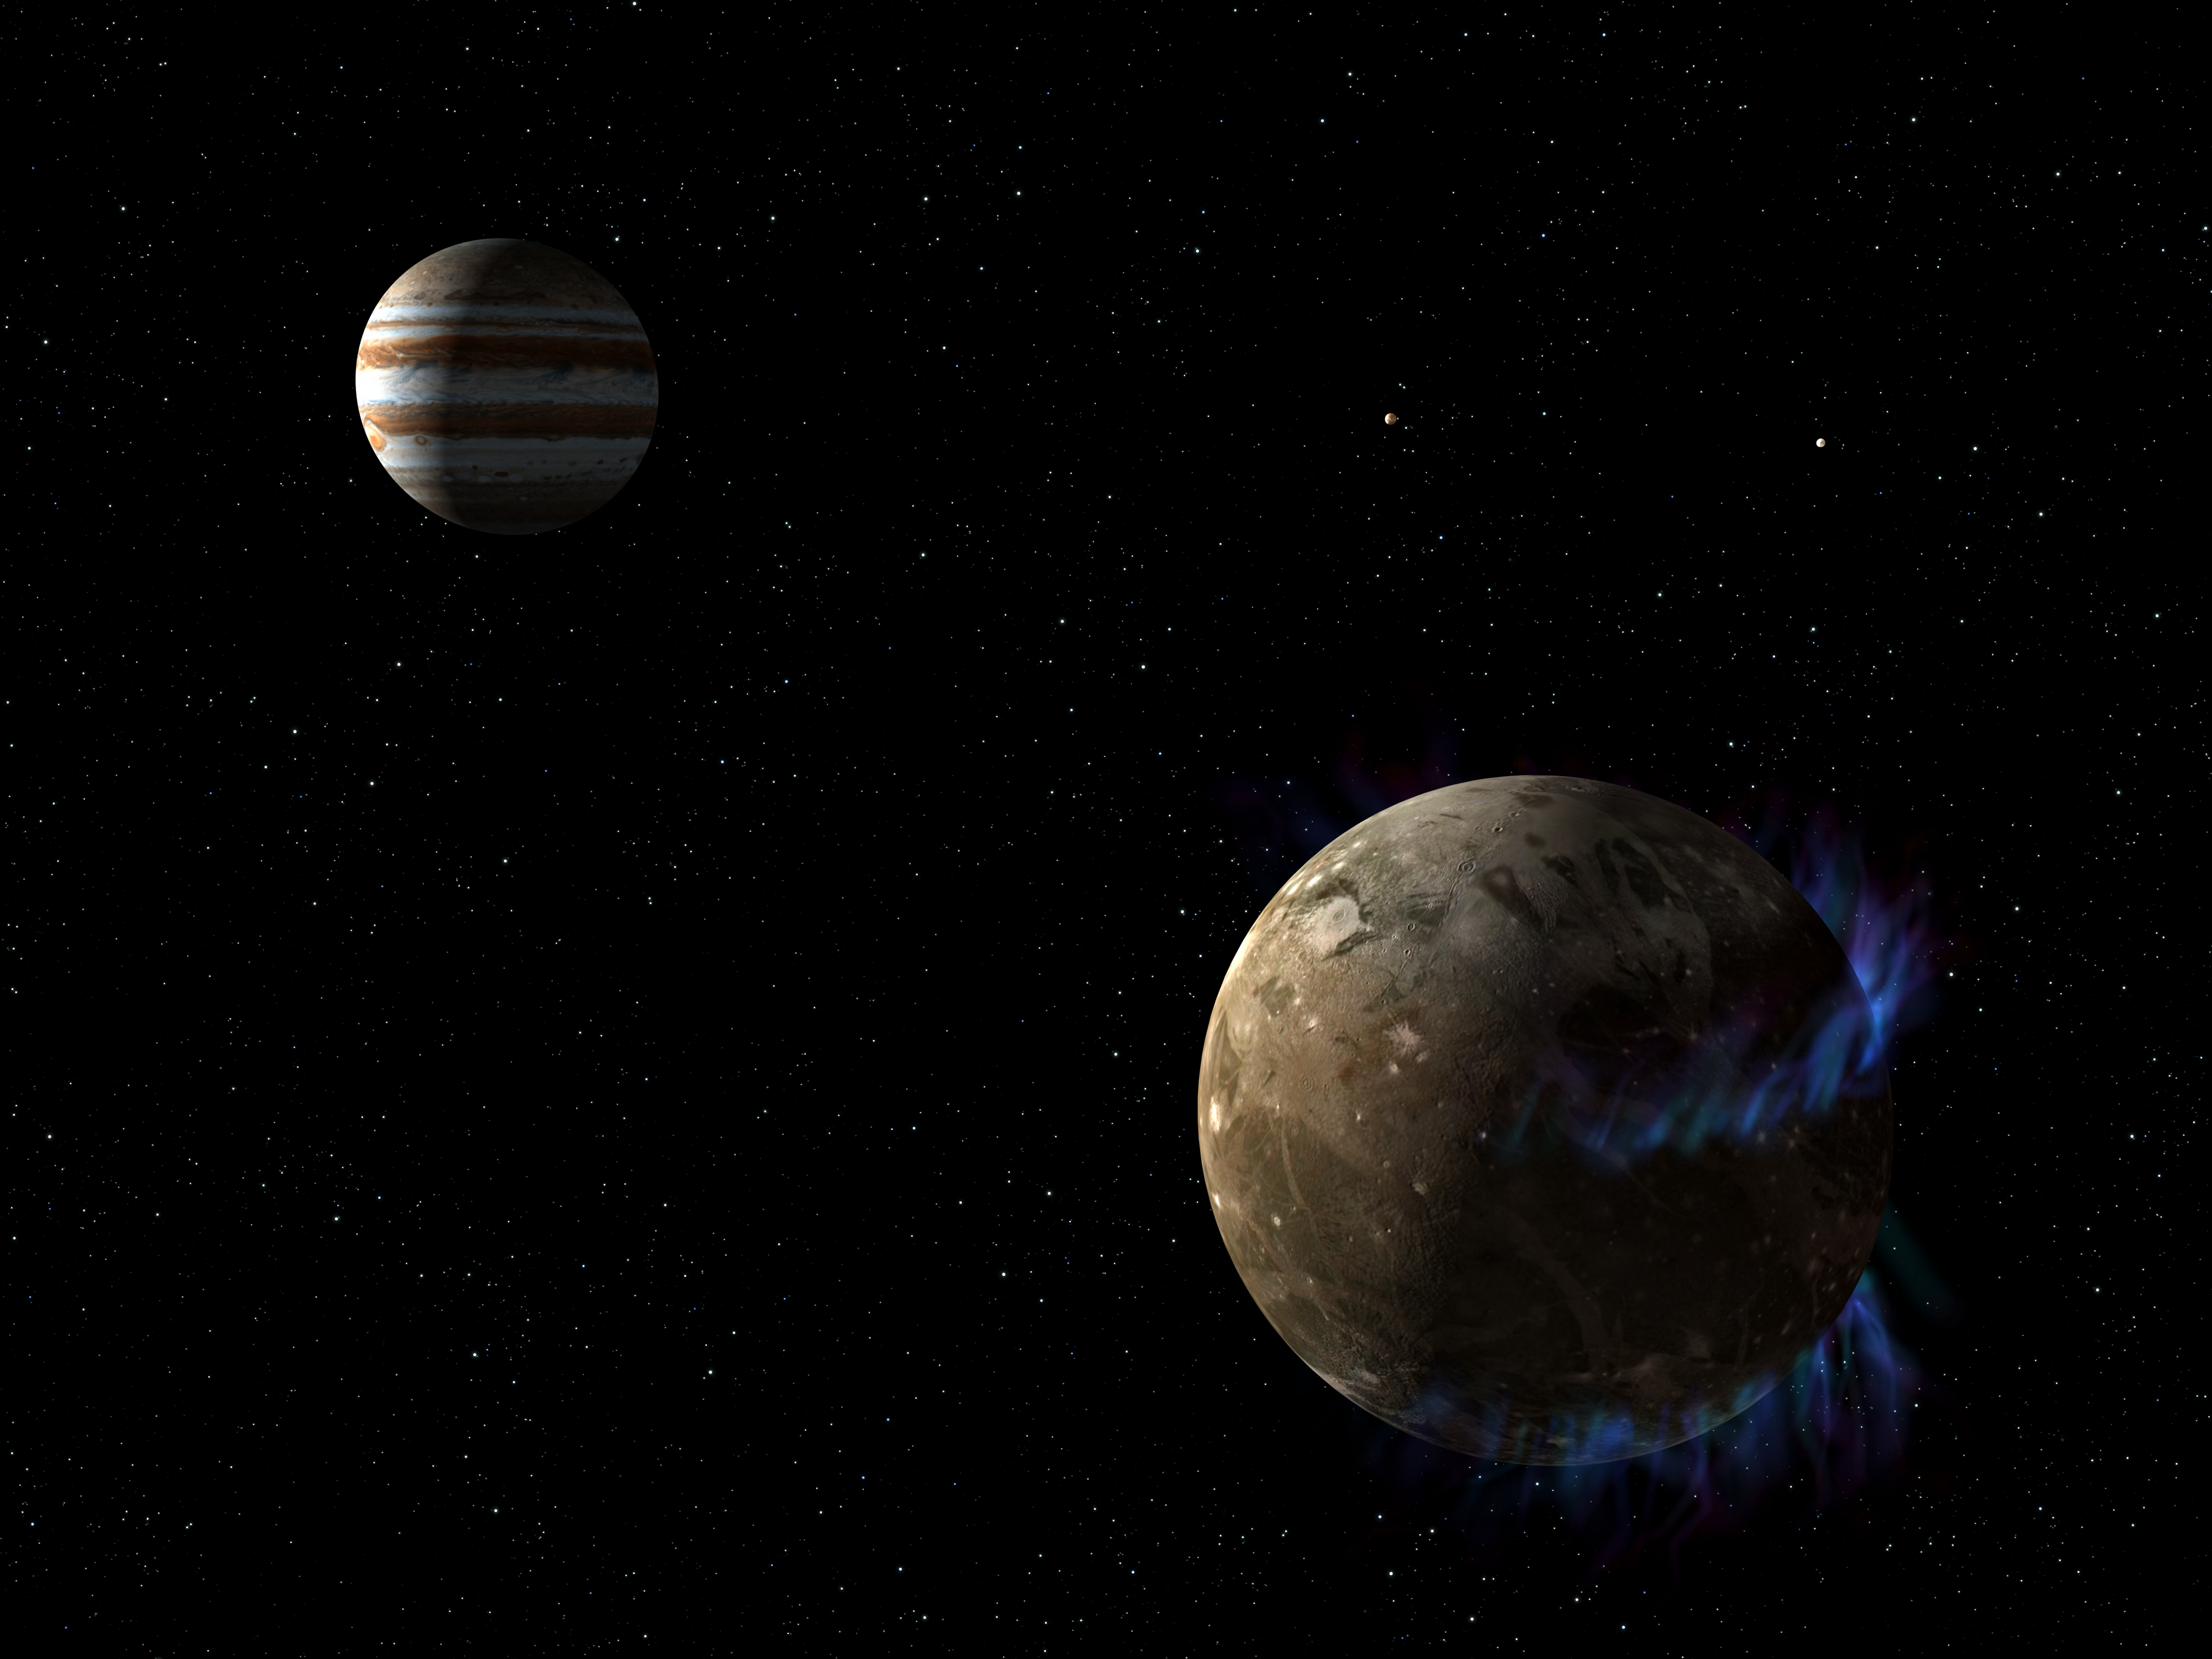

Artist’s illustration of aurorae and Ganymede

This is an artist's illustration of the moon Ganymede as it orbits the giant planet Jupiter. The NASA/ESA Hubble Space Telescope has observed aurorae on the moon that are controlled by Ganymede's magnetic fields. Two auroral ovals can be seen over northern and southern mid-latitudes.

Hubble measured slight shifts in the auroral belts due to the influence of Jupiter's own immense magnetic field. This activity allows for a probe of the moon's interior. The presence of a saline ocean under the moon's icy crust would reduce the shifting of the ovals. Hubble measured just this, showing that such an ocean exists.

As on Earth, Ganymede's aurorae are produced by energetic charged particles causing gases to fluoresce.

Credit: NASA, ESA, and G. Bacon (STScI)